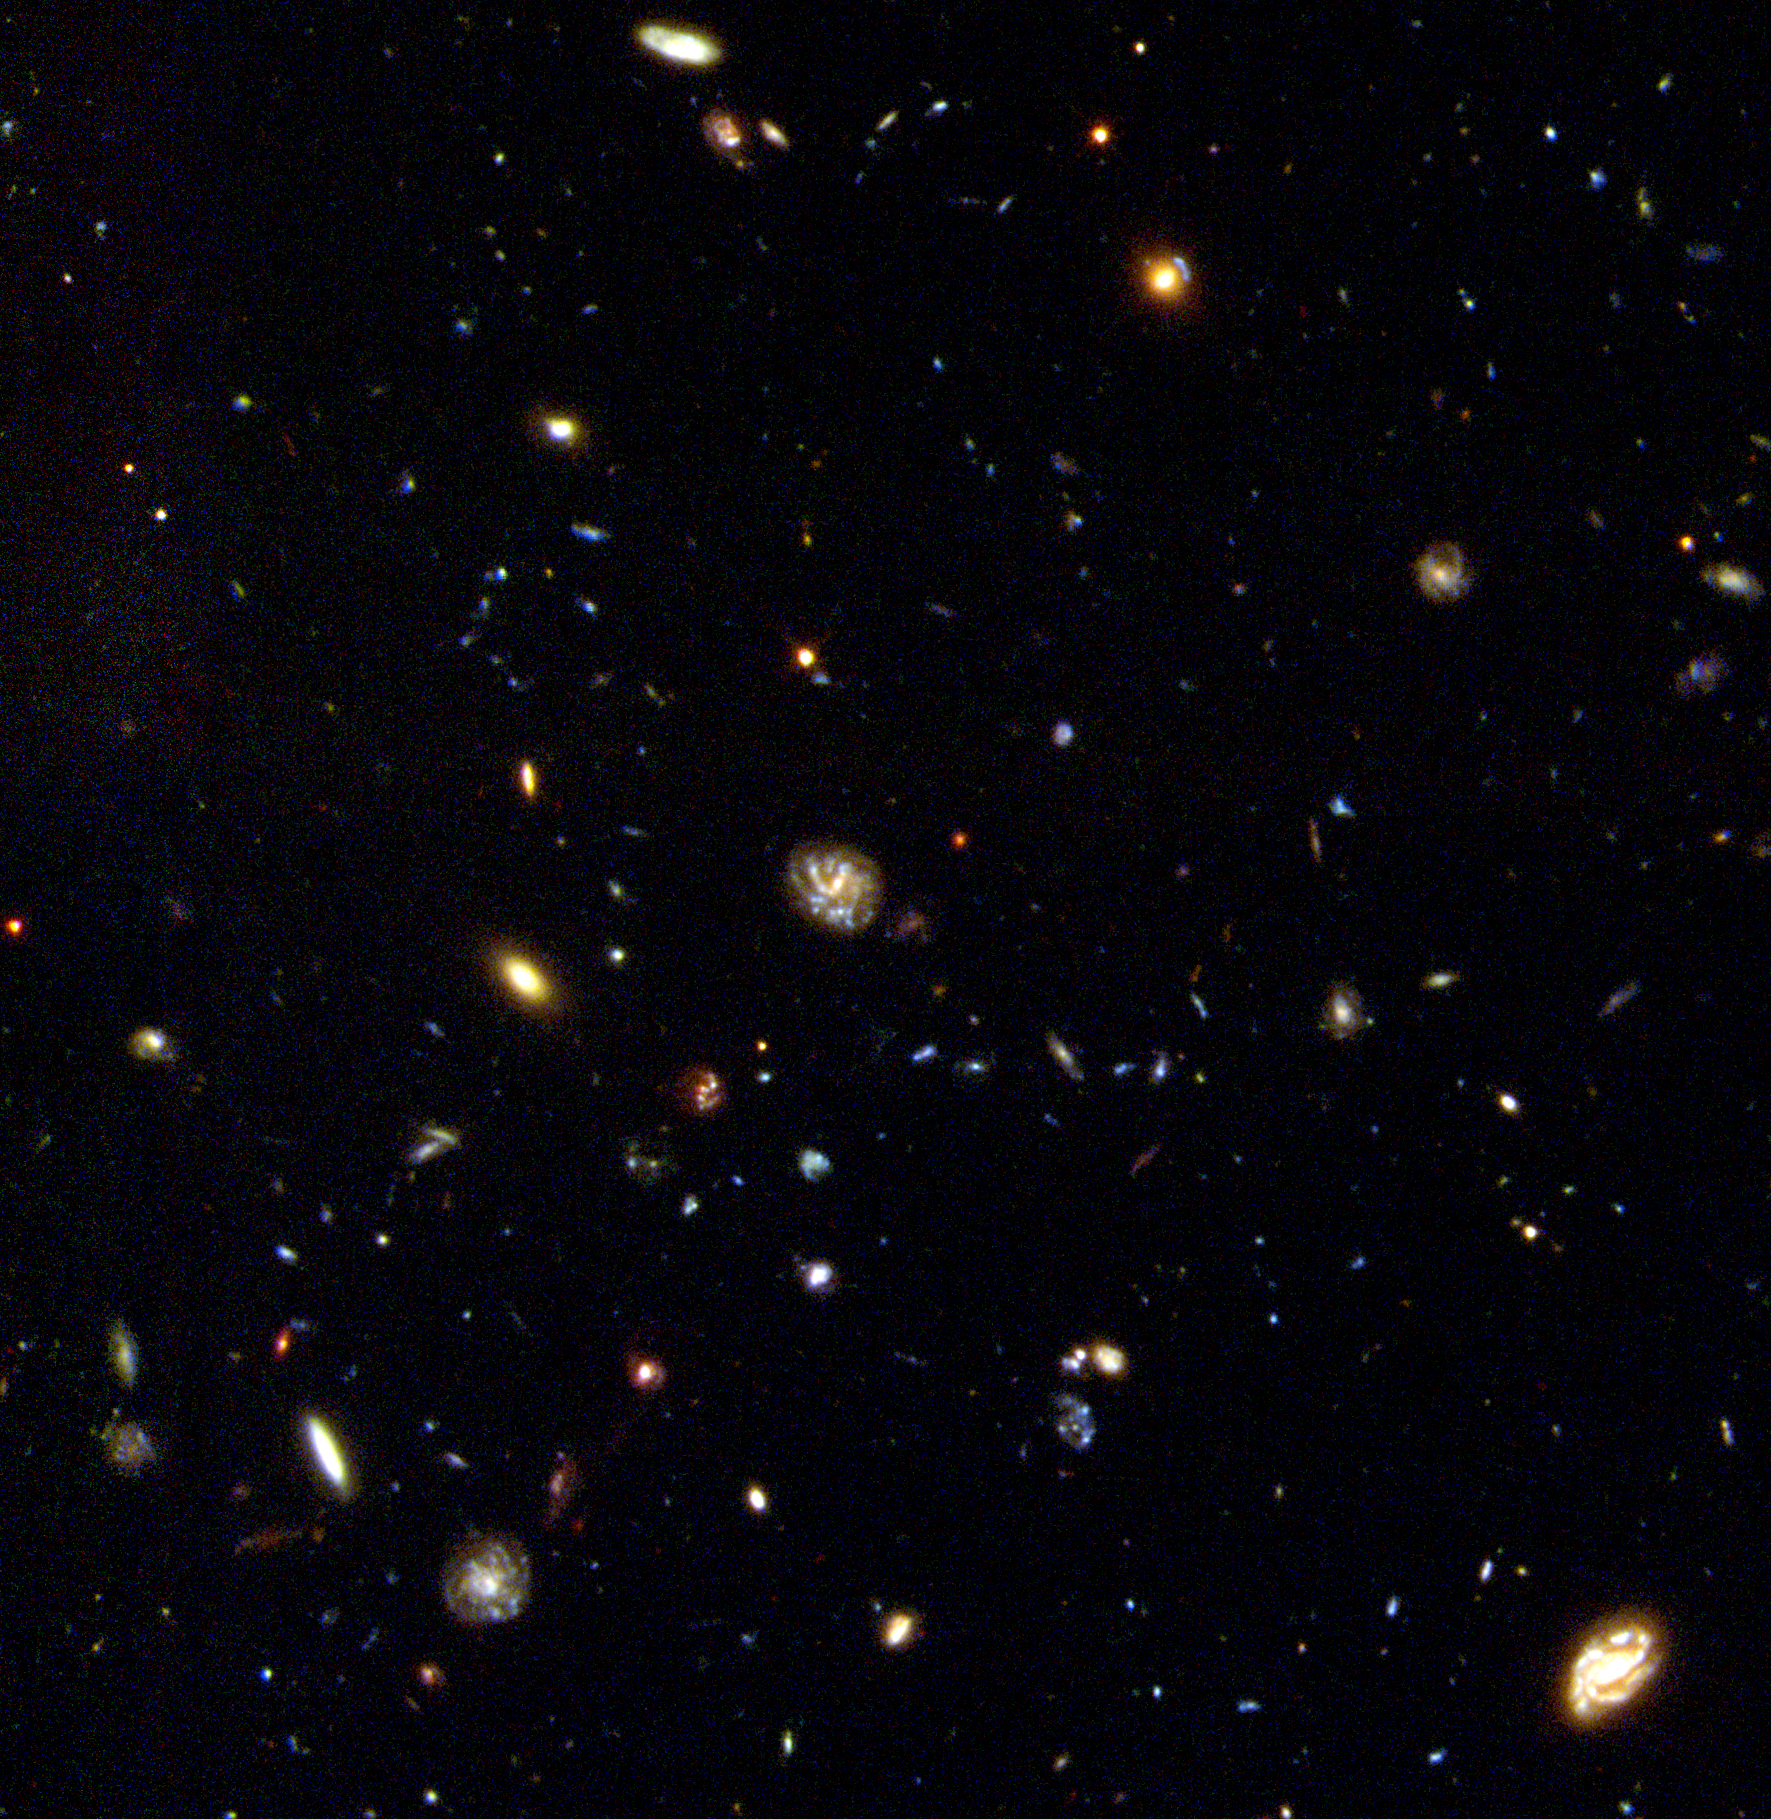

Hubble Deep Field South Unveils Myriad Galaxies

A NASA/ESA Hubble Space Telescope view down a 12 billion light-year long corridor of space loaded with a dazzling assortment of thousands of never-before seen galaxies.

Credit: R. Williams (STScI), the HDF-S Team, and NASA/ESA